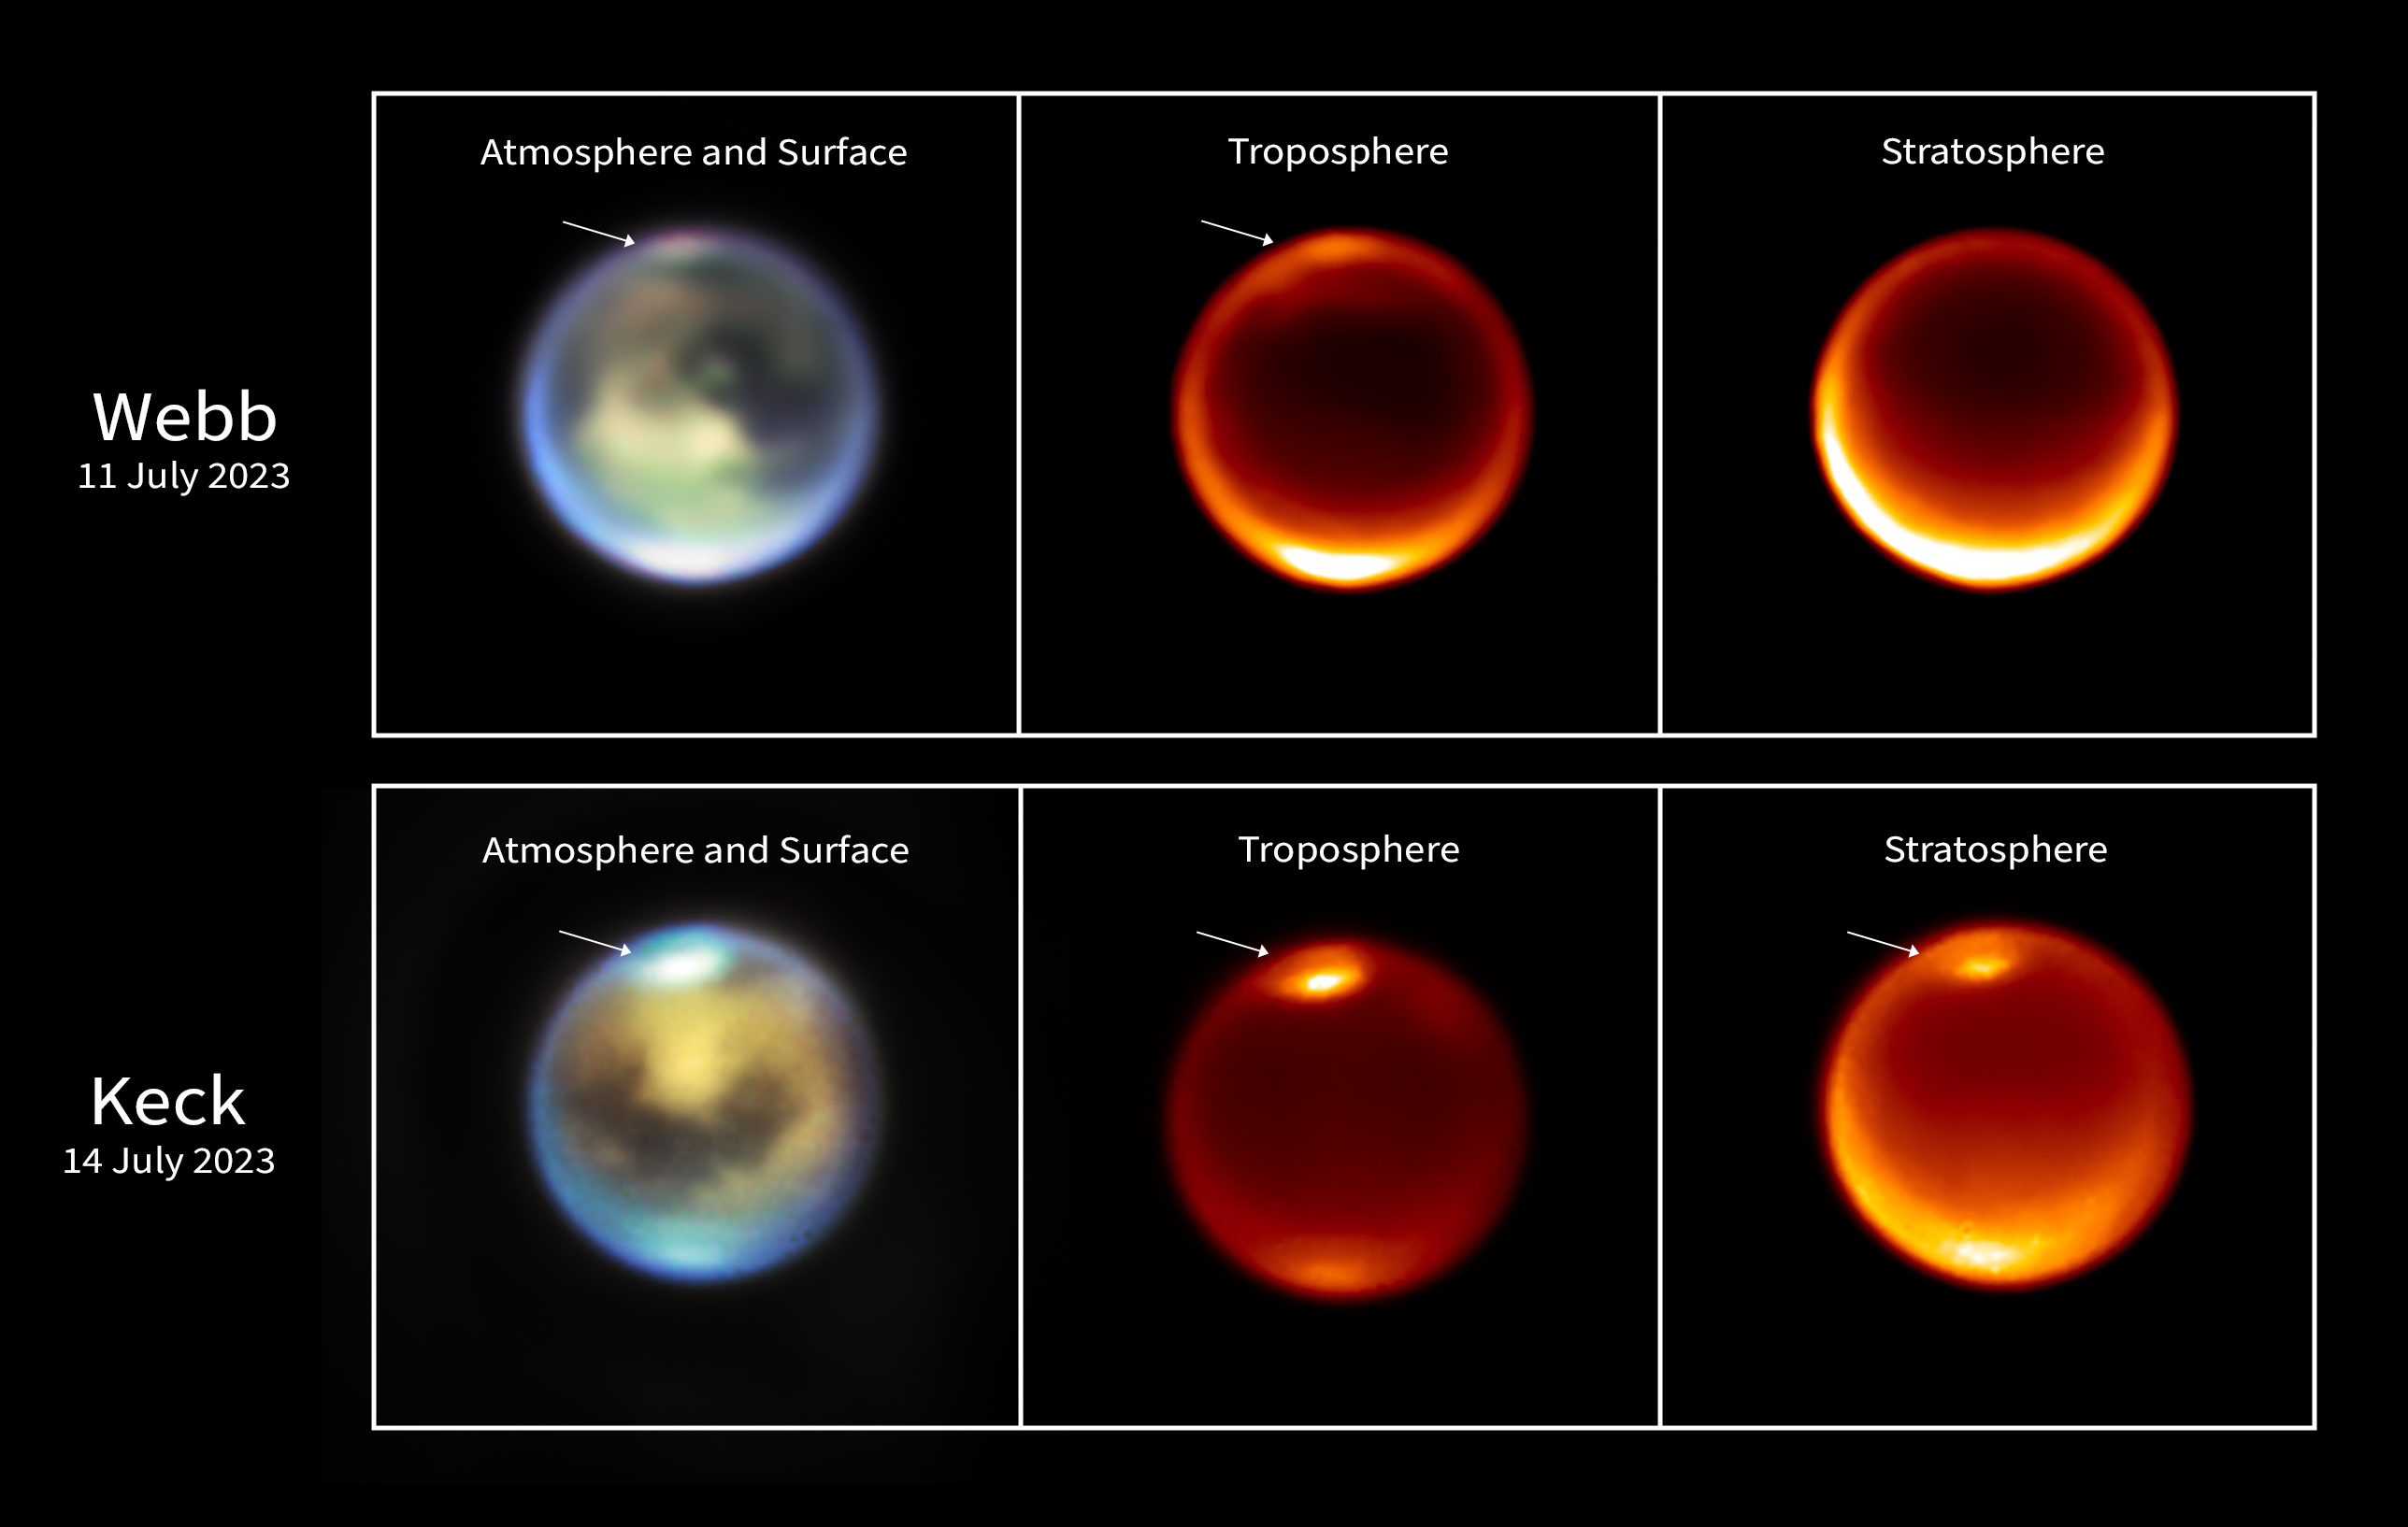

Titan (Webb and Keck image - 11 and 14 July 2023)

These images of Titan were taken by the NASA/ESA/CSA James Webb Space Telescope on 11July 2023 (top row) and the ground-based W.M. Keck Observatories on 14 July 2023 (bottom row). They show methane clouds (denoted by the white arrows) appearing at different altitudes in Titan’s northern hemisphere.

On the left side are representative-colour images from both telescopes. In the Webb image light at 1.4 microns is coloured blue, 1.5 microns is green, and 2.0 microns is red (filters F140M, F150W, and F200W, respectively). In the Keck image light at 2.13 microns is coloured blue, 2.12 microns is green, and 2.06 microns is red (H2 1-0, Kp, and He1b, respectively).

In the middle column are single-wavelength images taken by Webb and Keck at 2.12 microns. This wavelength is sensitive to emission from Titan’s lower troposphere. The rightmost images show emission at 1.64 microns (Webb) and 2.17 microns (Keck), which favour higher altitudes, in Titan’s upper troposphere and stratosphere (an atmospheric layer above the troposphere). It demonstrates that the clouds are seen at higher altitudes on July 14 than earlier on July 11, indicative of upward motion.

Credit: NASA, ESA, CSA, STScI, Keck Observatory